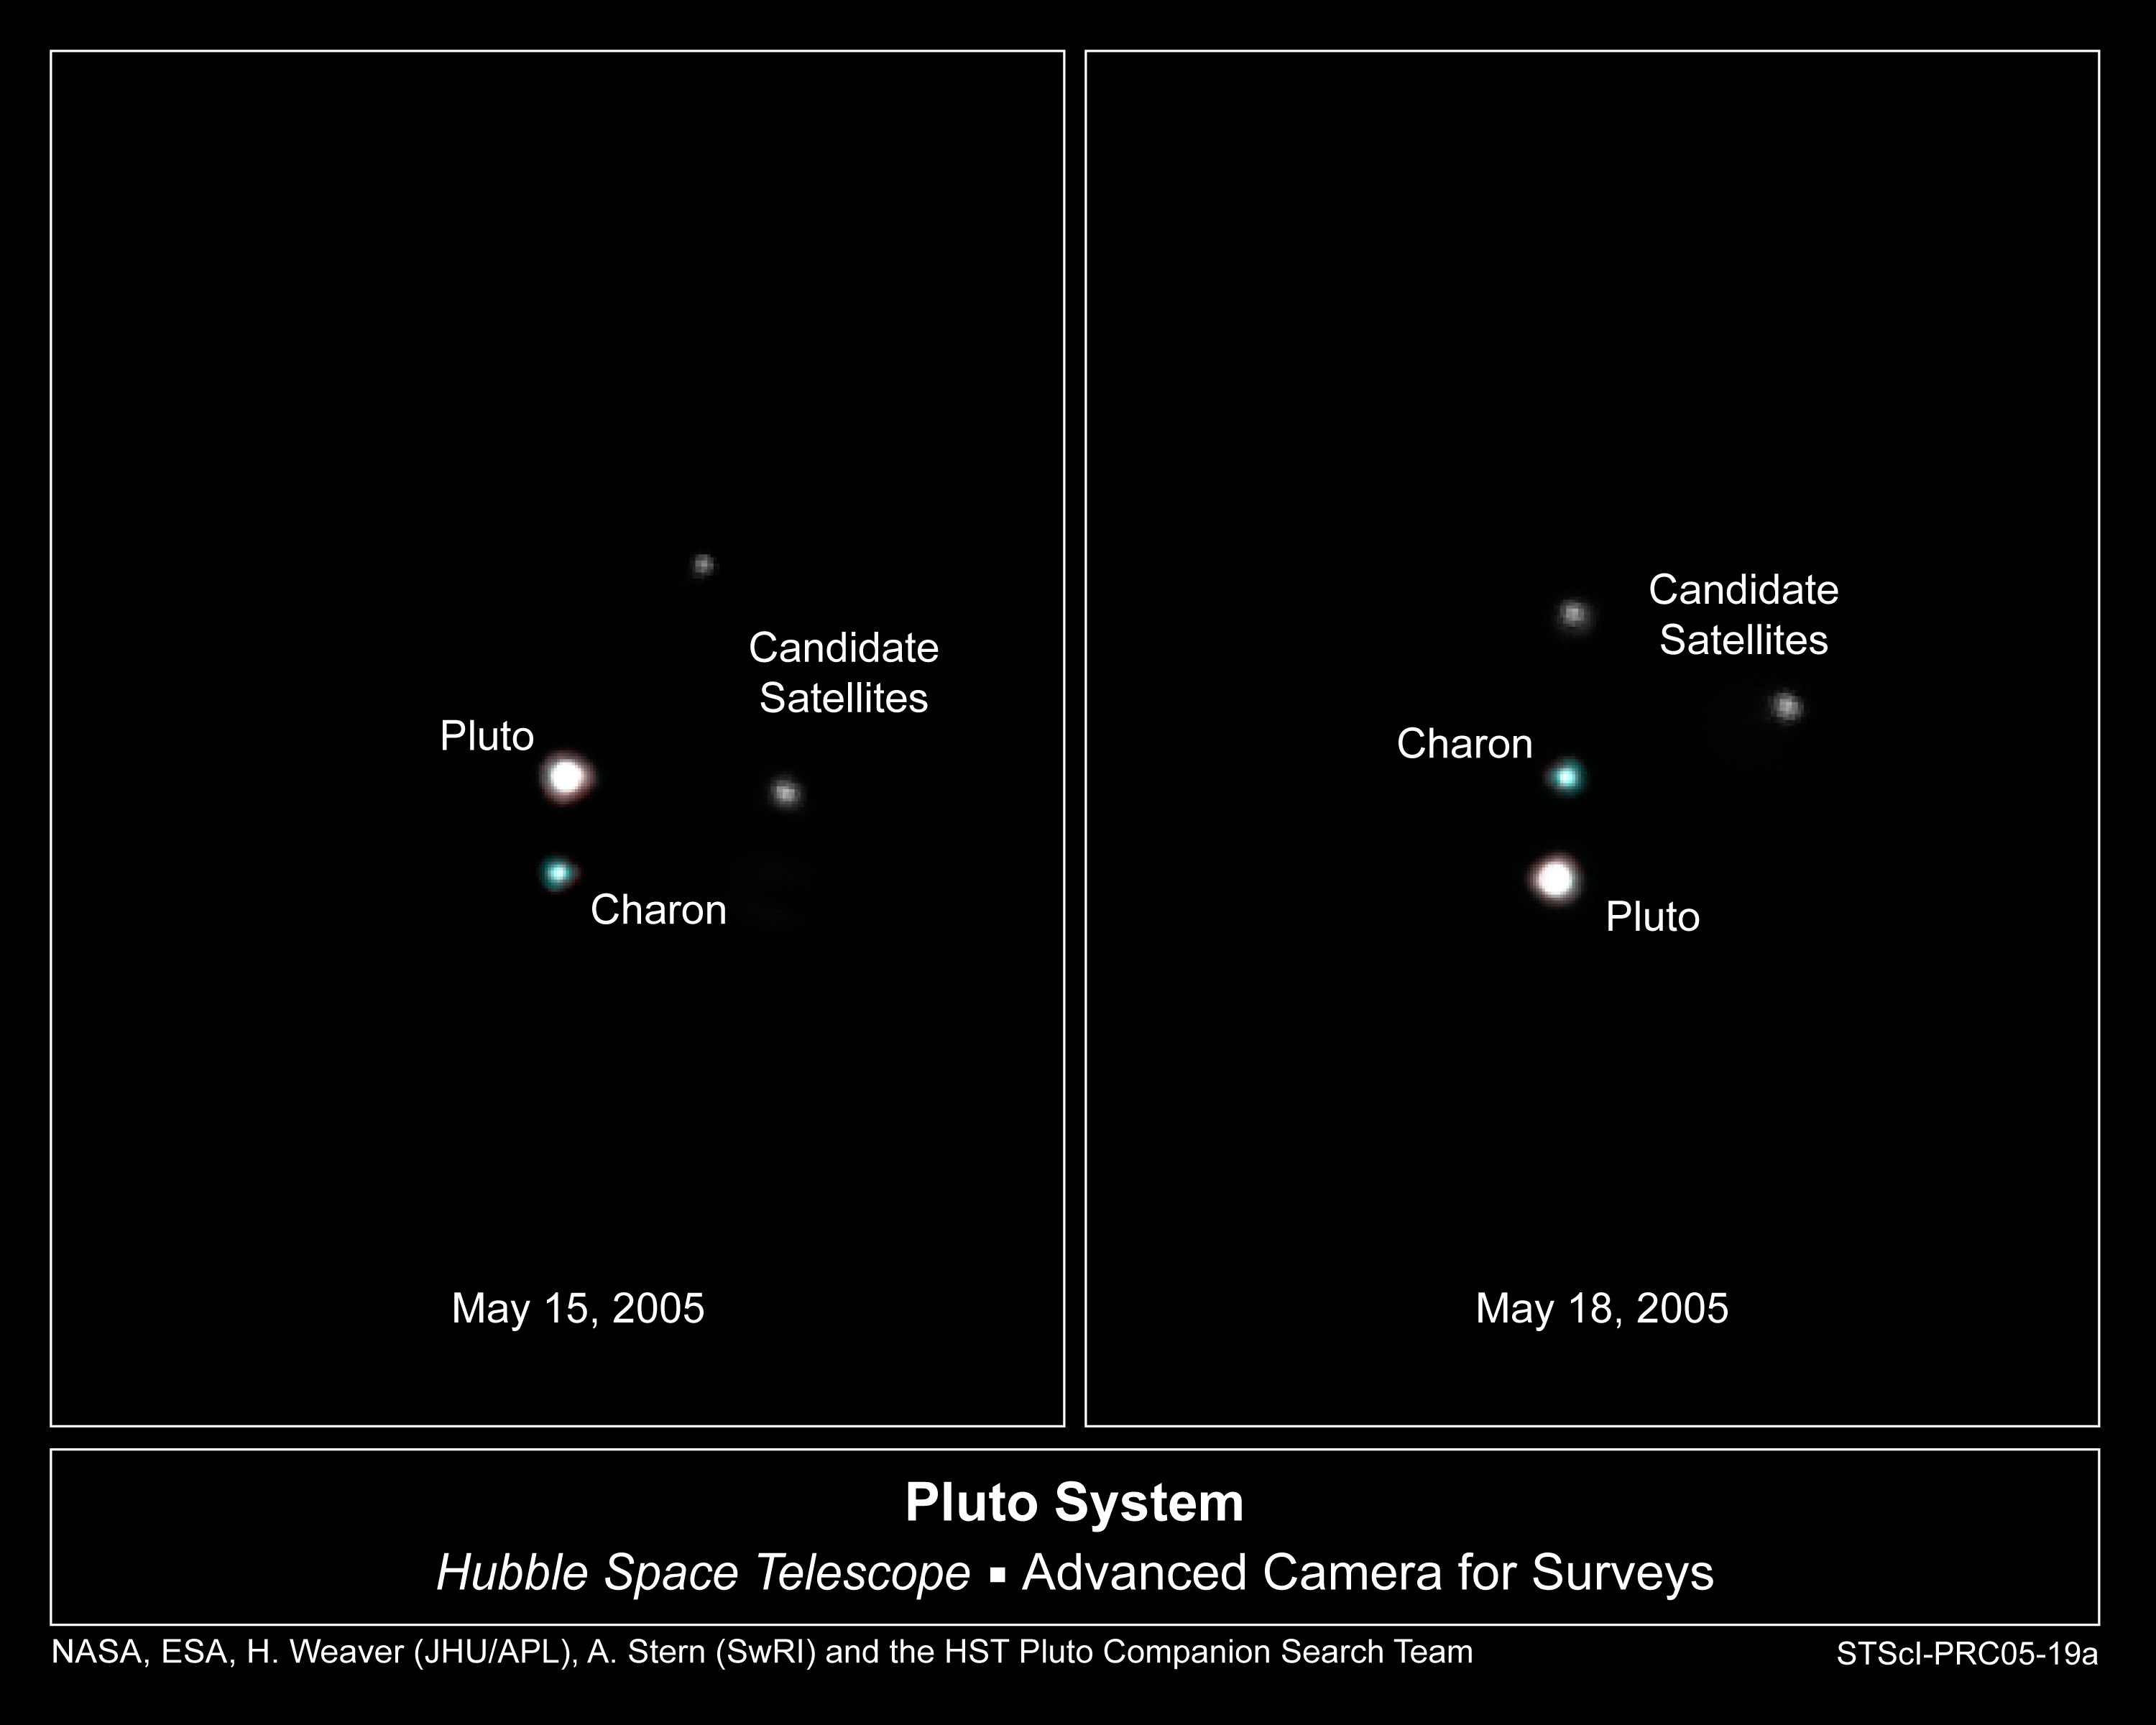

Hubble Spies Possible New Moons Orbiting Pluto

These Hubble Space Telescope images, taken by the Advanced Camera for Surveys, reveal Pluto, its large moon Charon, and the planet's two new candidate satellites. Between May 15 and May 18, 2005, Charon, and the putative moons, provisionally designated P1 and P2, all appear to rotate counterclockwise around Pluto. P1 and P2 move less than Charon because they are farther from Pluto, and therefore would be orbiting at slower speeds. P1 and P2 are thousands of times less bright than Pluto and Charon. The enhanced-color images of Pluto (the brightest object) and Charon (to the right of Pluto) were constructed by combining short exposure images taken in filters near 475 nanometers (blue) and 555 nanometers (green-yellow). The images of the new satellites were made from longer exposures taken in a single filter centered near 606 nanometers (yellow), so no colour information is available for them.

Credit: NASA, ESA, H. Weaver (JHU/APL), A. Stern (SwRI), and the Hubble Space Telescope Pluto Companion Search Team